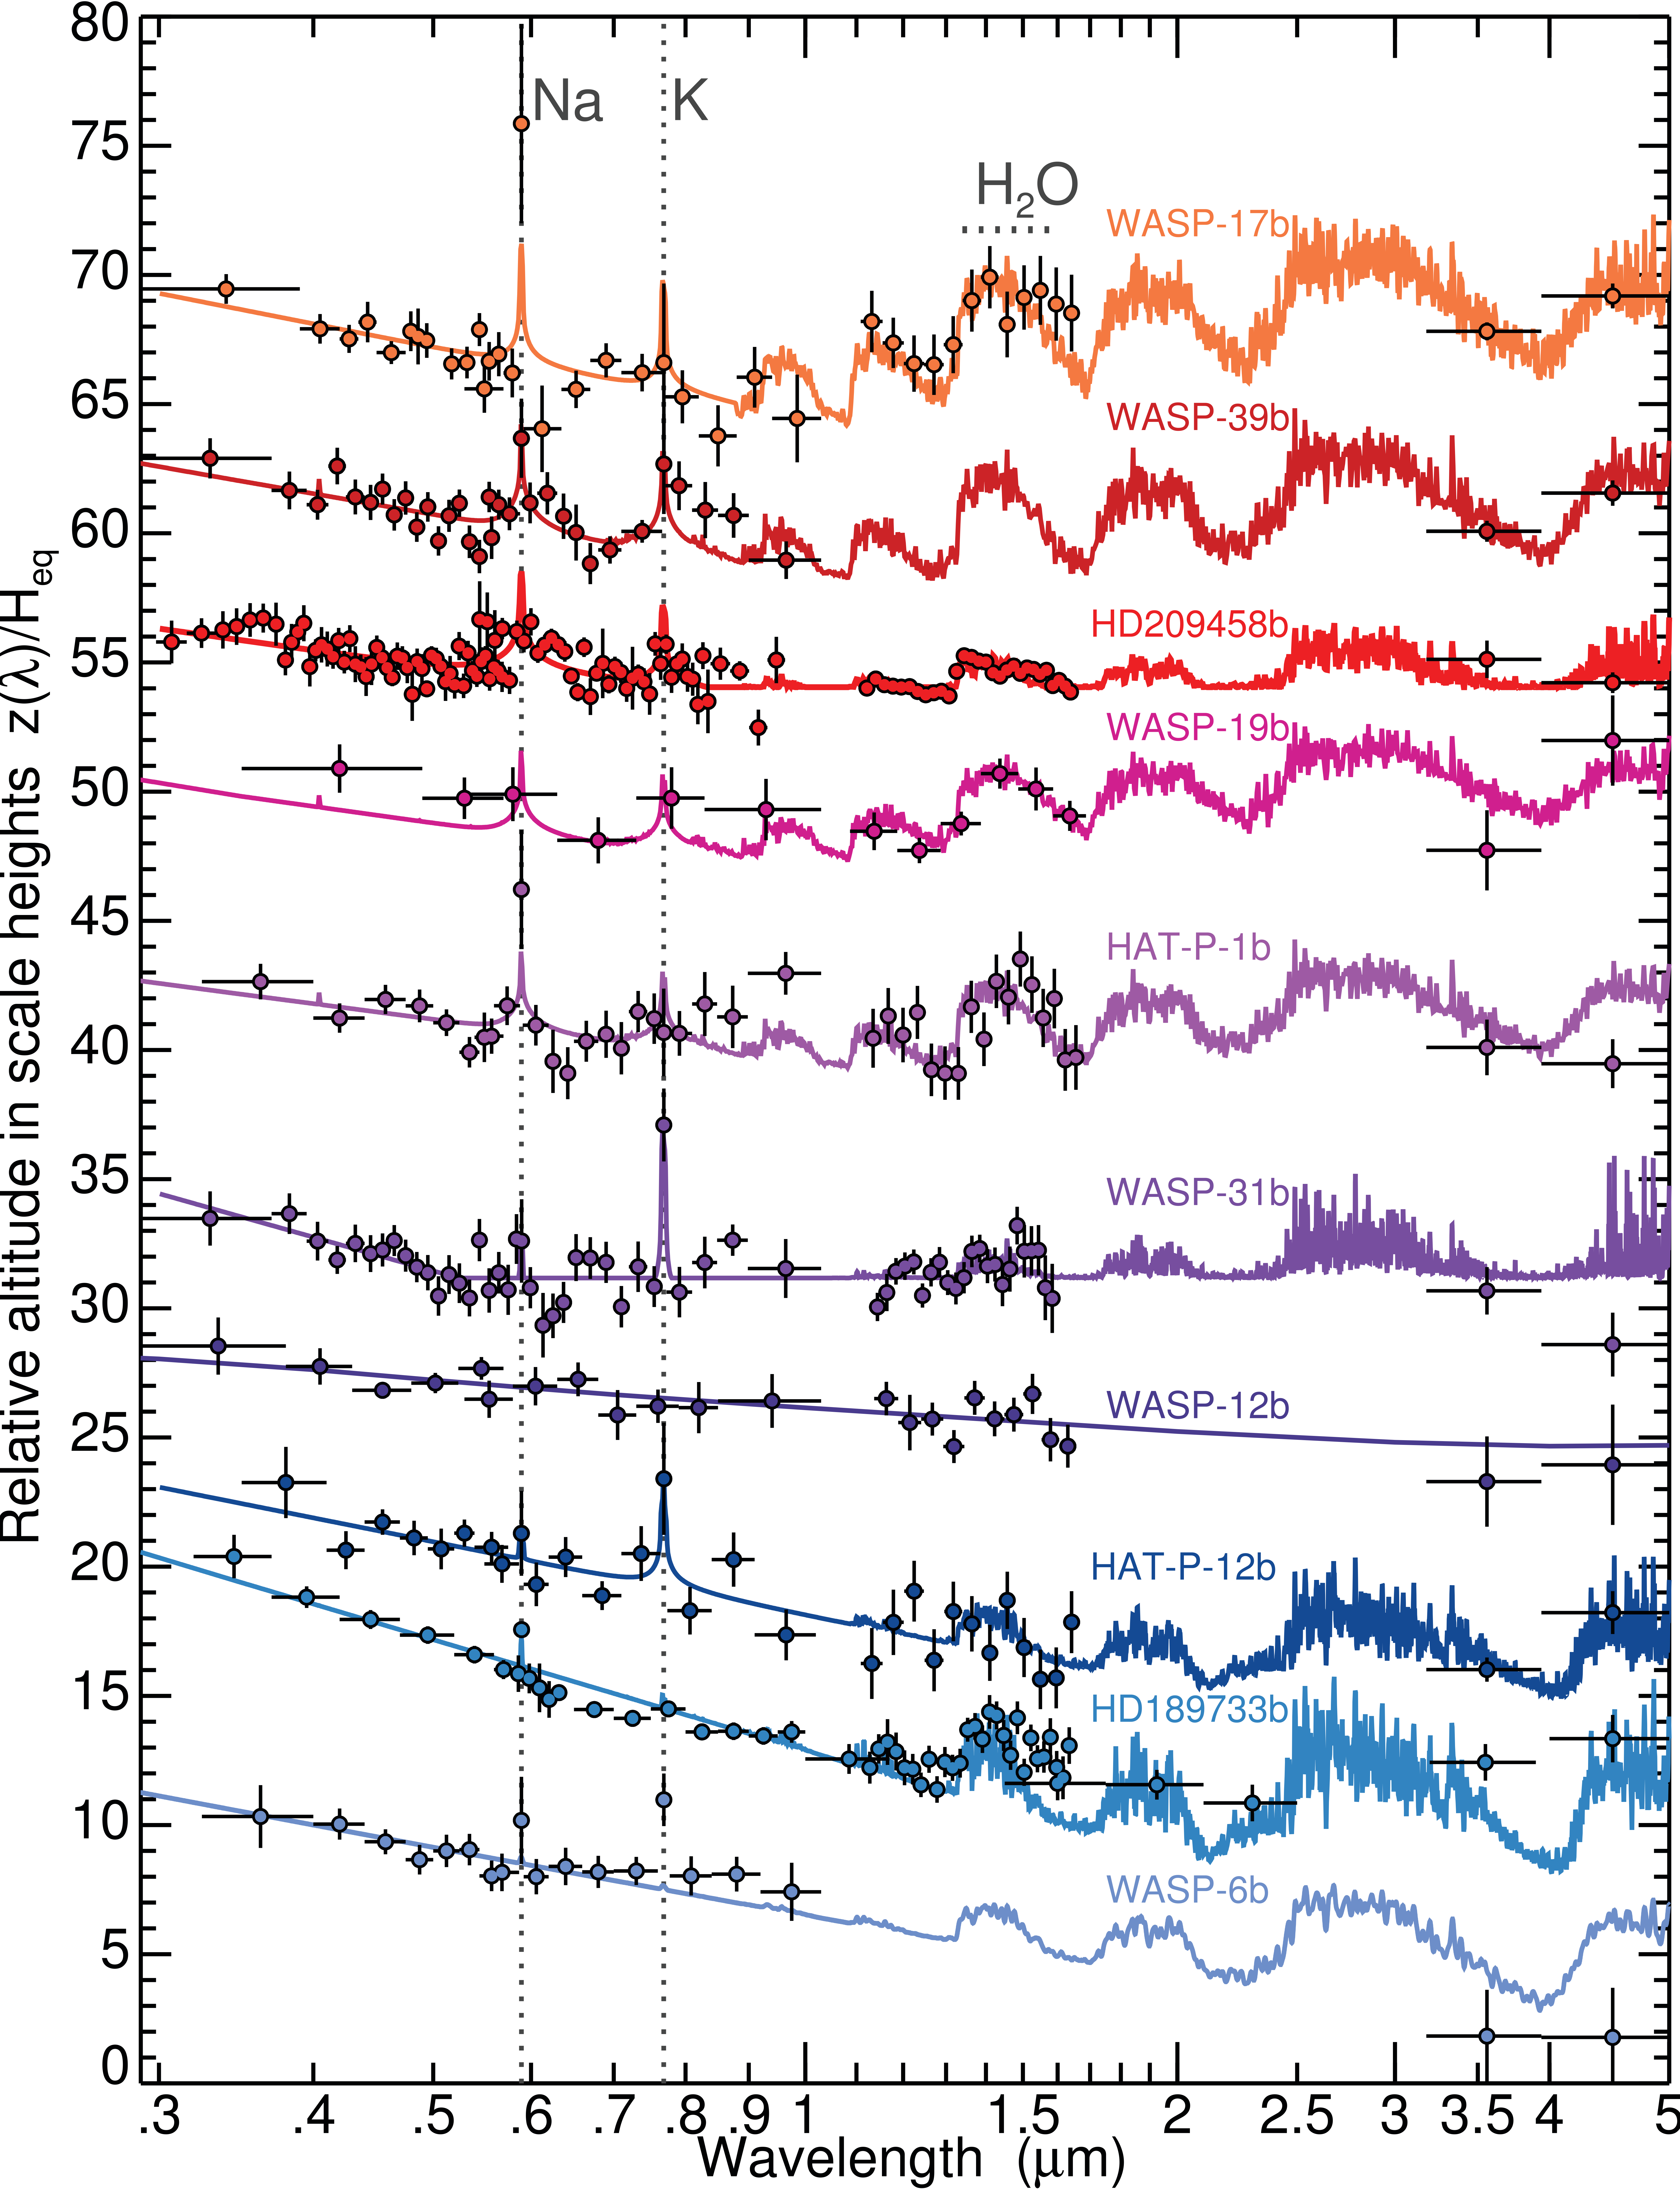

Transmission spectra of hot Jupiters

Hubble transmission spectral sequence of hot Jupiters from Sing et al. (2016). Data gathered with the STIS and the WFC3 instruments as well as with NASA’s Spitzer Space Telescope are shown, along with fitted atmospheric models, with prominent spectral features indicated. The spectra have been ordered by the altitude difference between the blue-optical and mid-infrared. Planets with clear atmospheres (top) show prominent alkali and H2O absorption, with infrared radii commensurate with, or higher than, the optical altitudes. Very hazy and cloudy planets (bottom) have strong optical scattering slopes, narrow alkali lines and H2O absorption that is partially or completely obscured.

Credit: Sing et al.